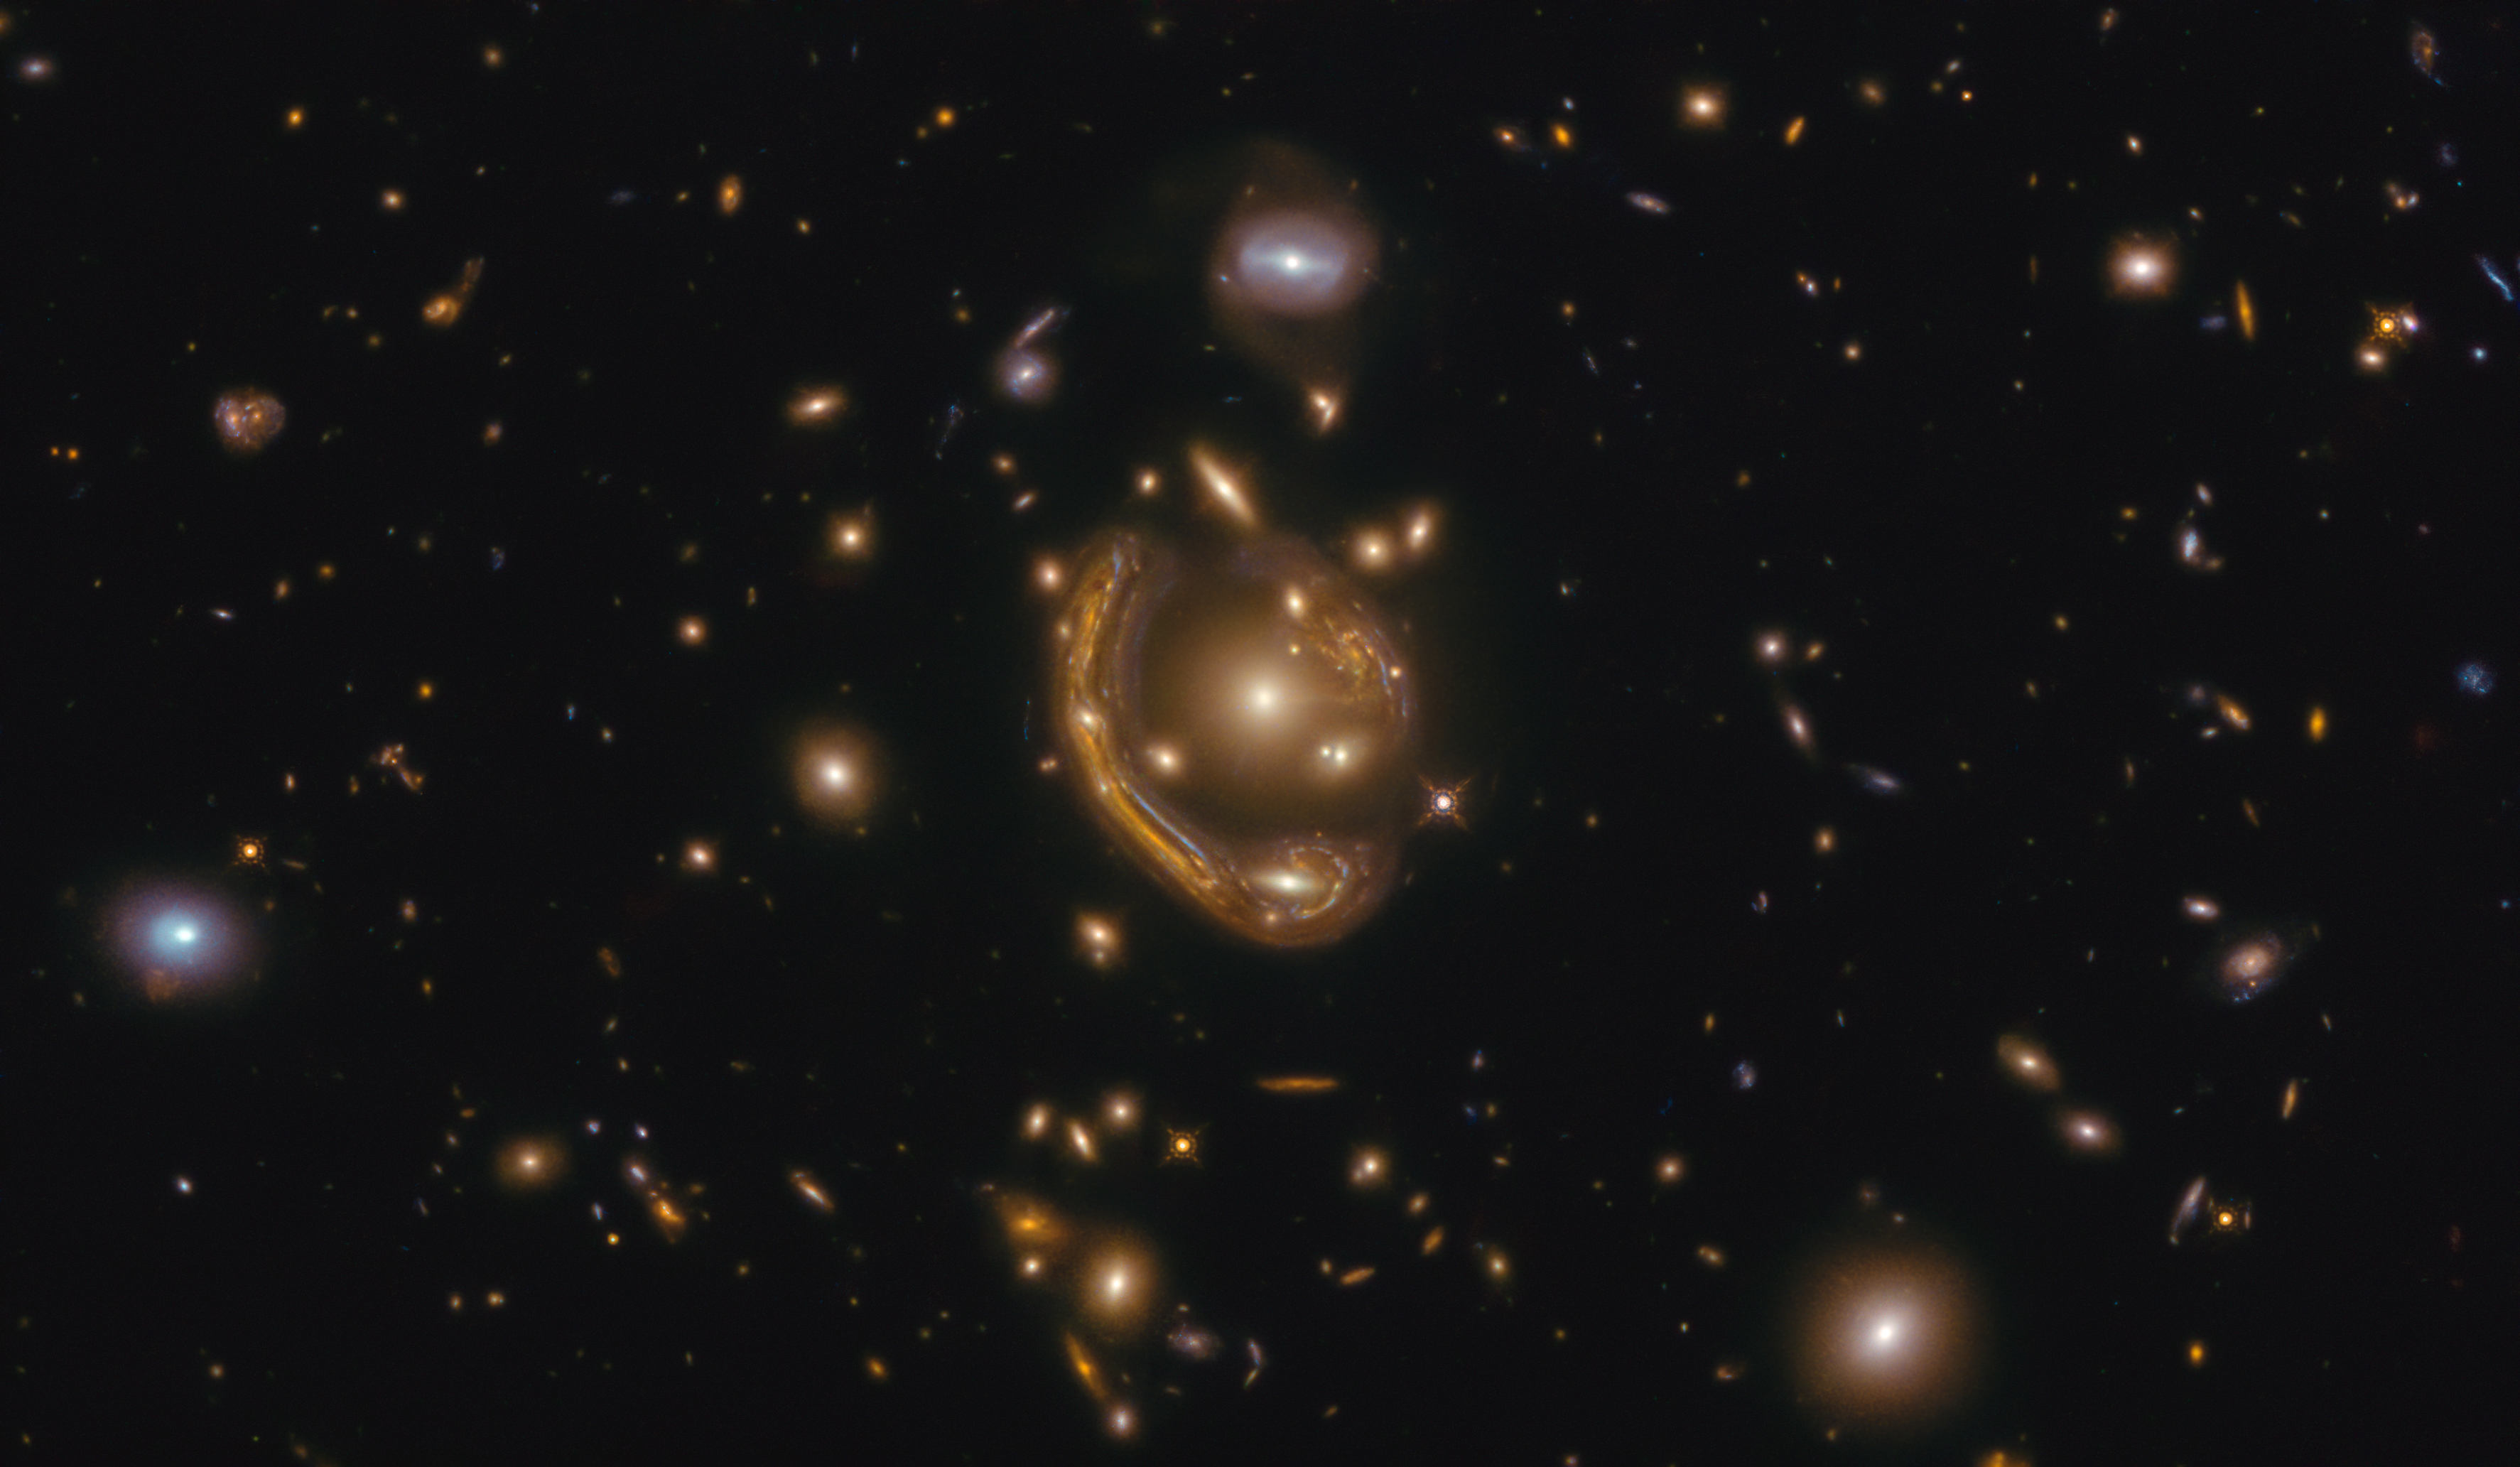

Rings of Relativity

The narrow galaxy elegantly curving around its spherical companion in this image is a fantastic example of a truly strange and very rare phenomenon. This image, taken with the NASA/ESA Hubble Space Telescope, depicts GAL-CLUS-022058s, located in the southern hemisphere constellation of Fornax (The Furnace). GAL-CLUS-022058s is the largest and one of the most complete Einstein rings ever discovered in our Universe. The object has been nicknamed by the Principal Investigator and his team who are studying this Einstein ring as the "Molten Ring", which alludes to its appearance and host constellation.

First theorised to exist by Einstein in his general theory of relativity, this object’s unusual shape can be explained by a process called gravitational lensing, which causes light shining from far away to be bent and pulled by the gravity of an object between its source and the observer. In this case, the light from the background galaxy has been distorted into the curve we see by the gravity of the galaxy cluster sitting in front of it. The near exact alignment of the background galaxy with the central elliptical galaxy of the cluster, seen in the middle of this image, has warped and magnified the image of the background galaxy around itself into an almost perfect ring. The gravity from other galaxies in the cluster is soon to cause additional distortions.

Objects like these are the ideal laboratory in which to research galaxies too faint and distant to otherwise see.

Credit: ESA/Hubble & NASA, S. Jha Acknowledgement: L. Shatz